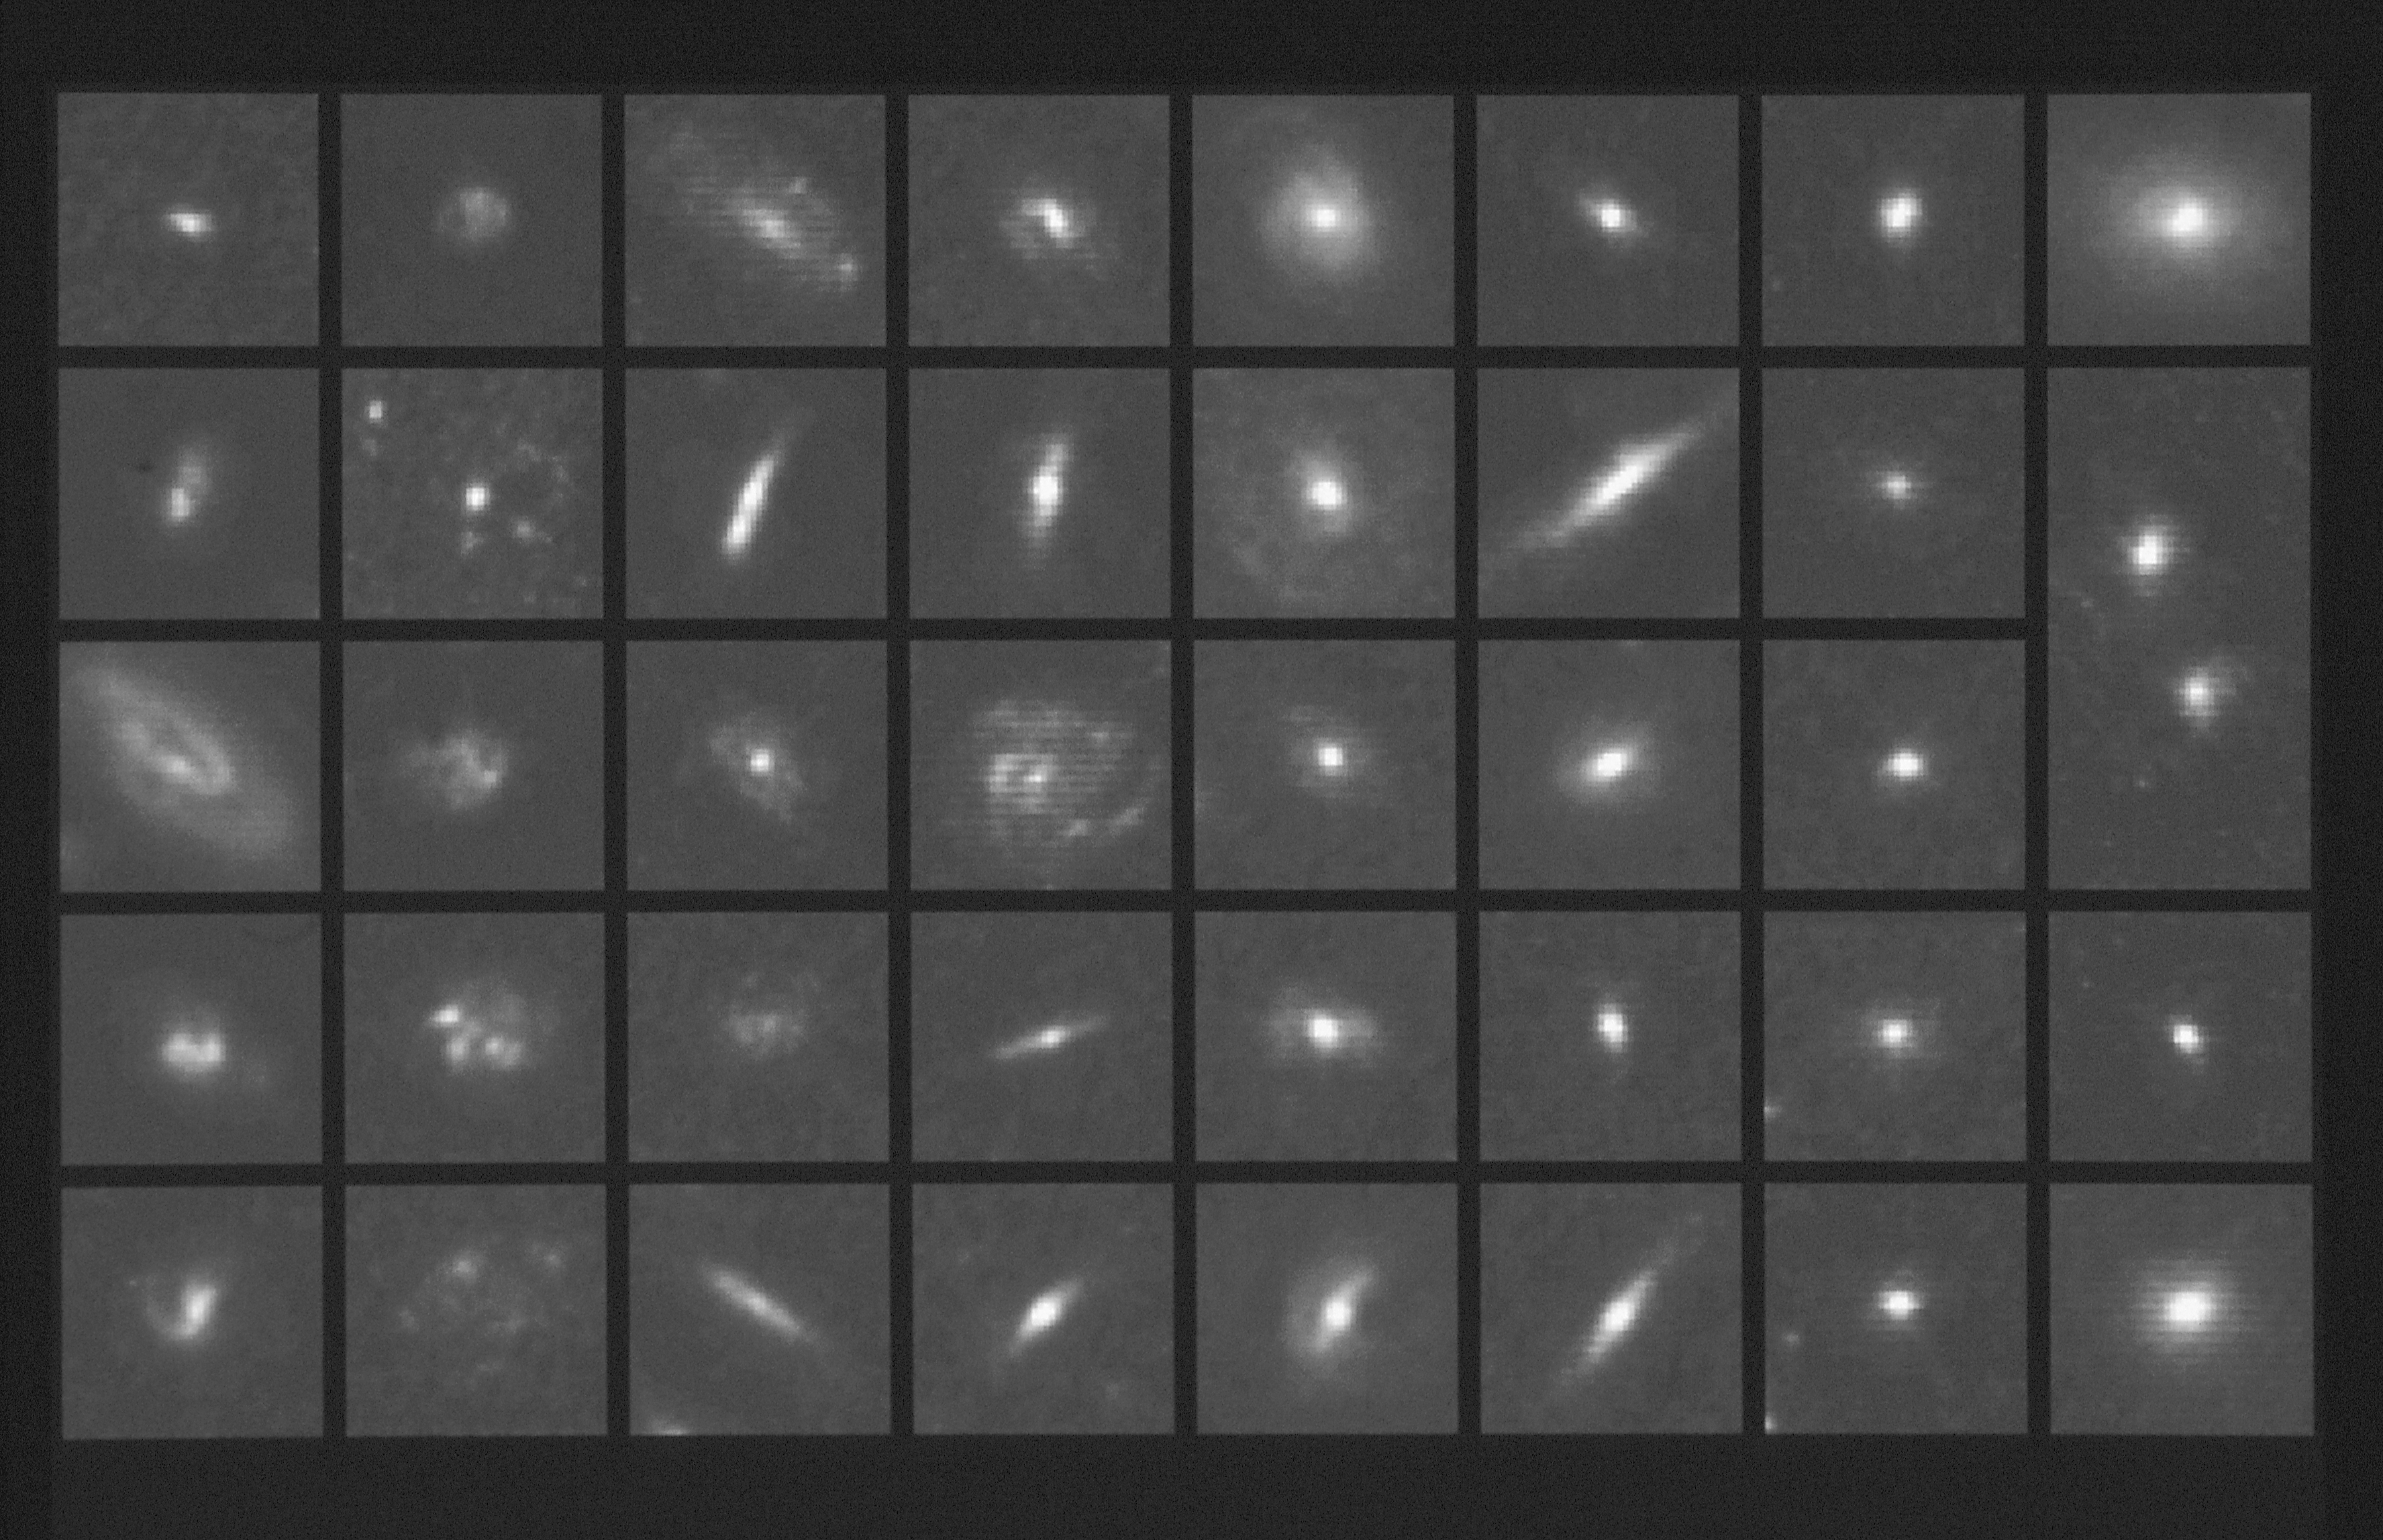

A "Hubble atlas" of ancient galaxies

Hubble Space Telescope's high resolution allows astronomers to classify galaxies in a cluster (CL 0939+4713) that existed four billion years ago, when the universe was two-thirds of its present age.

The galaxies in this mosaic are arranged according to the well-established system developed by American astronomer Edwin Hubble in the 1920s. Despite the cluster's great distance of four billion light-years, the Space Telescope pictures are sharp enough to distinguish between various forms galaxies.

Credit: Alan Dressier, Carnegie Institution, and NASA/ESA Co-investigators:Augustus Oemler (Yale Urnversfty), James E. Gunn (Princeton Universfty), HarveyButcher (the Netherlands Foundation for Research in Astronomy).